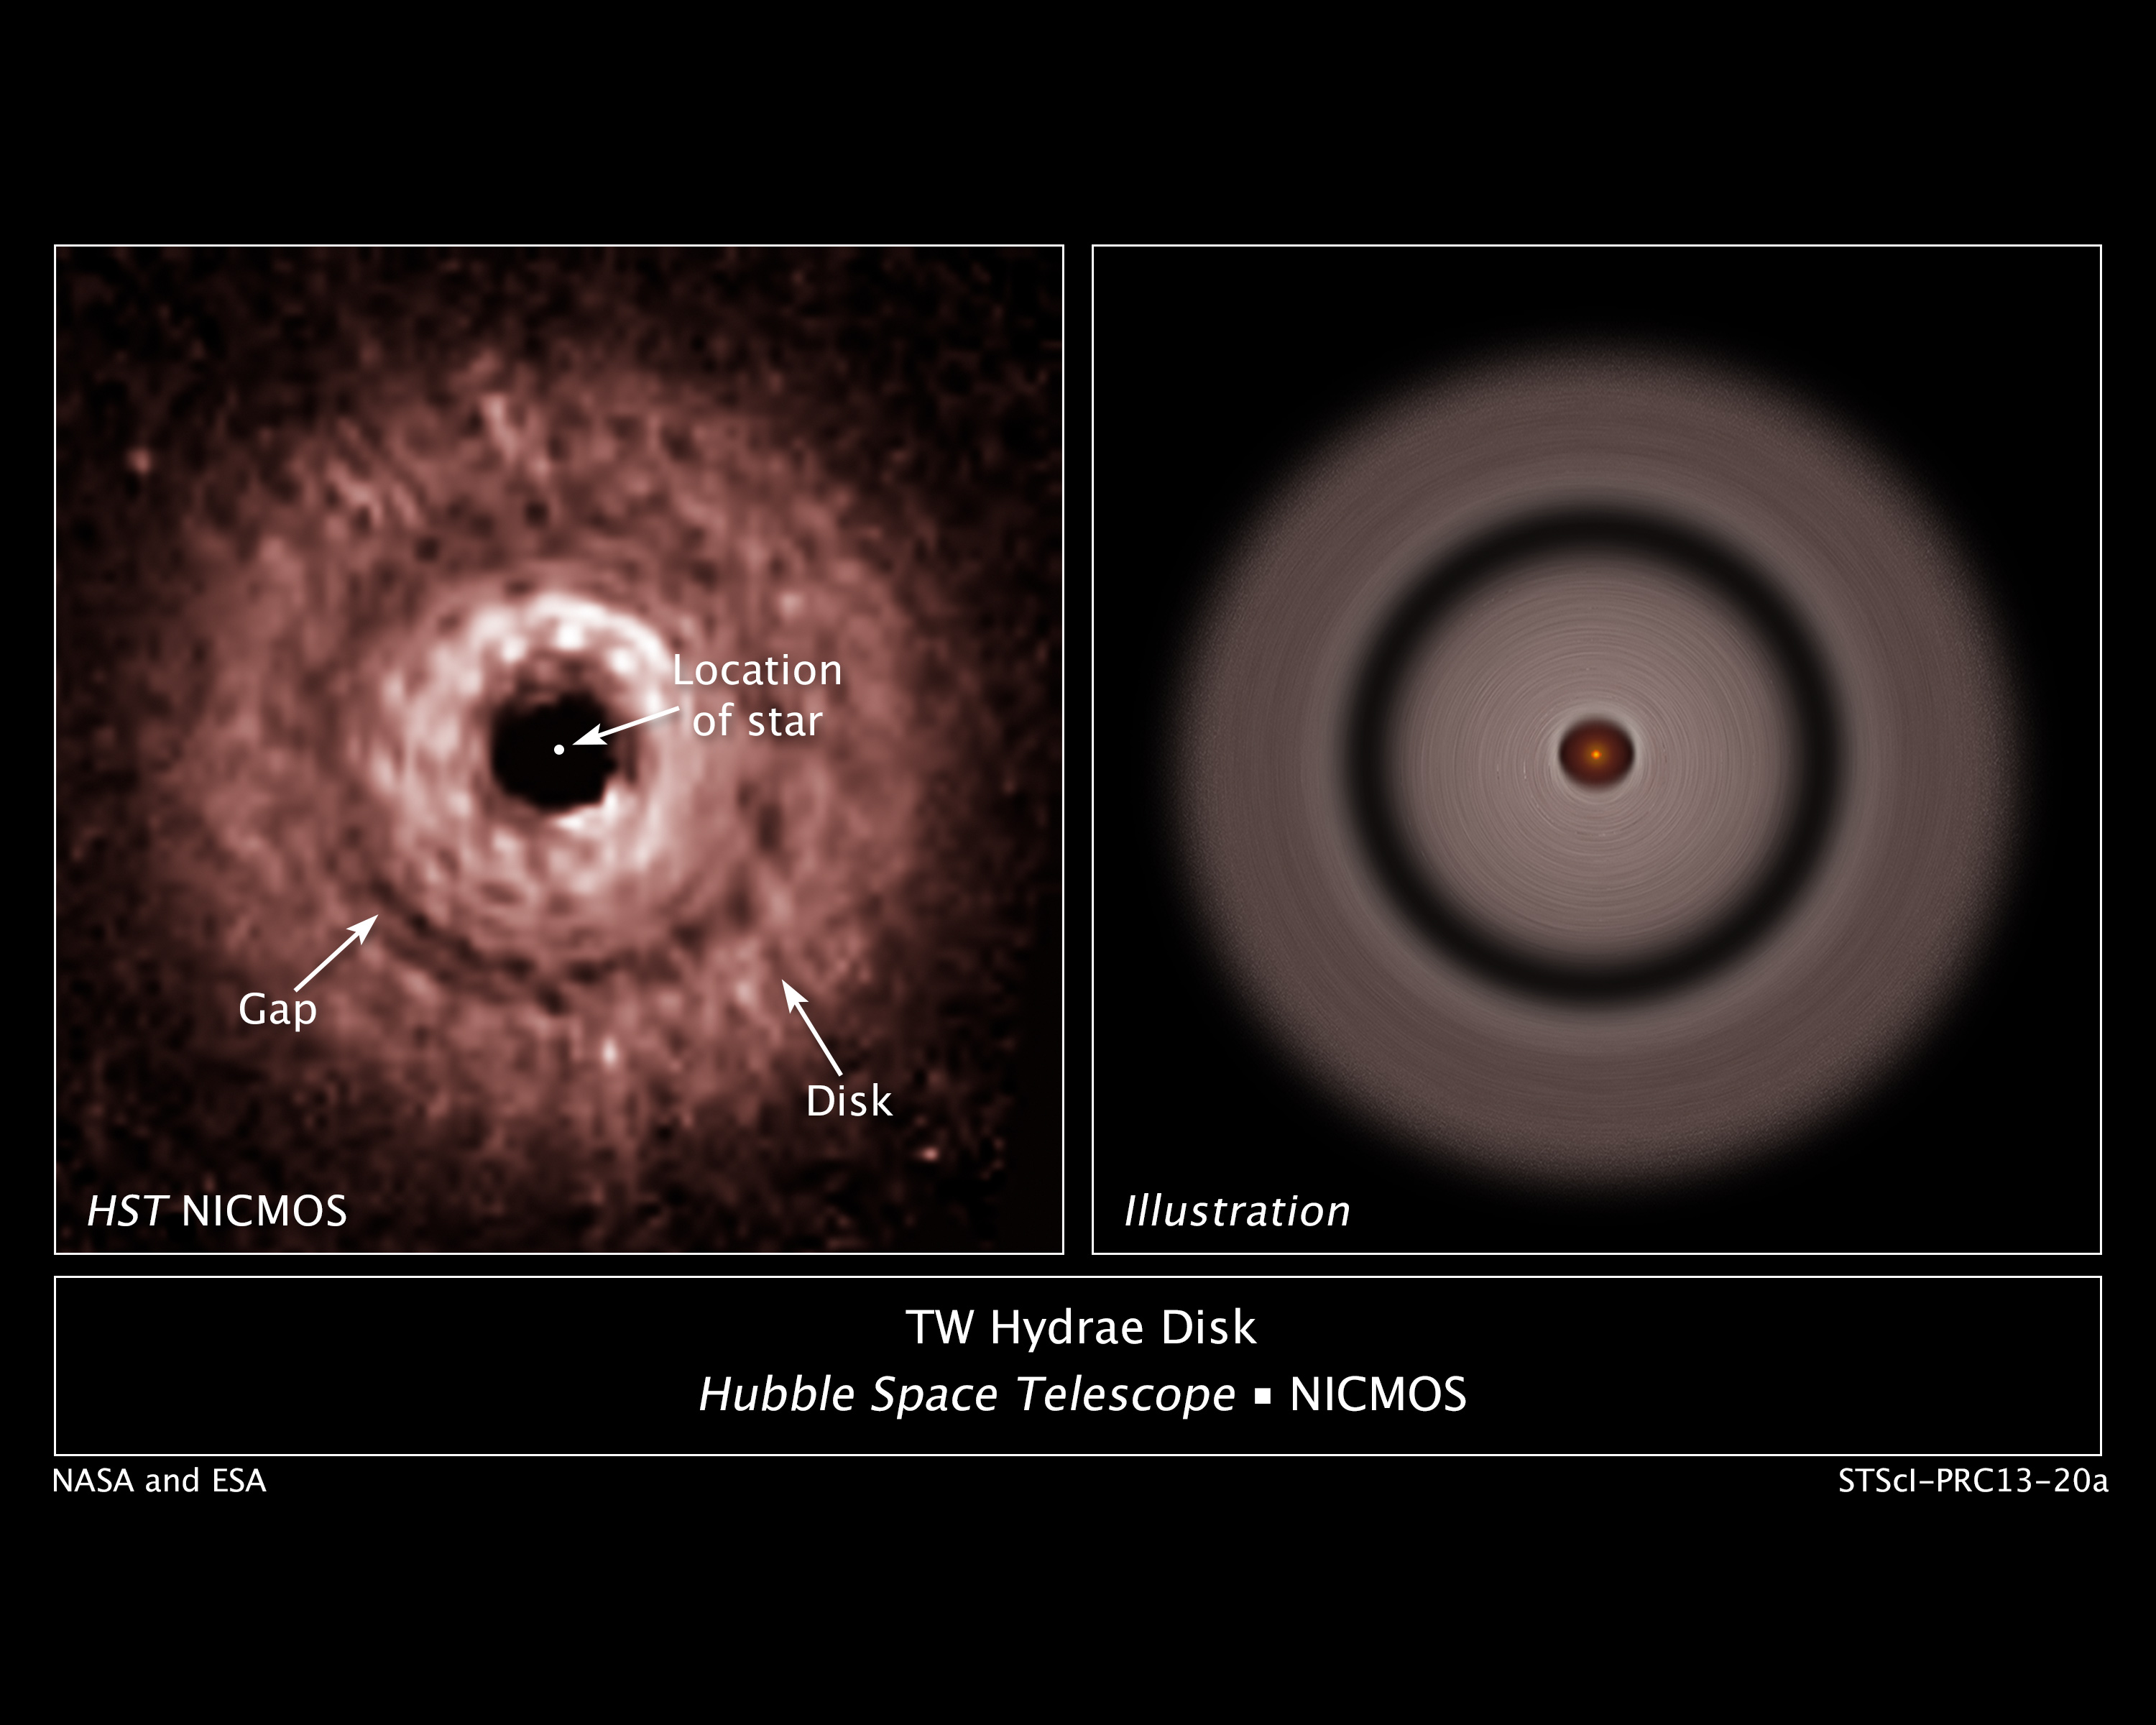

The protoplanetary disc around red dwarf star TW Hydrae

This graphic shows a gap in a protoplanetary disc of dust and gas whirling around the nearby red dwarf star TW Hydrae.

The gap's presence is best explained as due to the effects of a growing, unseen planet that is gravitationally sweeping up material and carving out a lane in the disc, like a snow plow.

In the NASA/ESA Hubble Space Telescope image at left, a gap can be seen about 12 billion kilometres away from the star in the centre of the disc. If the putative planet orbited in our Solar System, it would be roughly twice Pluto's distance from our Sun. The image was taken in near-infrared light by the Near Infrared Camera and Multi-Object Spectrometer (NICMOS).

Astronomers used a masking device on NICMOS to block out the star's bright light so that the disc's structure could be seen. The Hubble observations reveal that the gap, which is just over 3 billion kilometres wide, is not completely cleared out. The graphic at right shows the gap relative to the star. TW Hydrae resides 176 light-years away in the constellation of Hydra (The Sea Serpent).

These Hubble observations were taken on 9 June 2005.

Credit: NASA, ESA, J. Debes (STScI), H. Jang-Condell (University of Wyoming), A. Weinberger (Carnegie Institution of Washington), A. Roberge (Goddard Space Flight Center), and G. Schneider (University of Arizona/Steward Observatory)